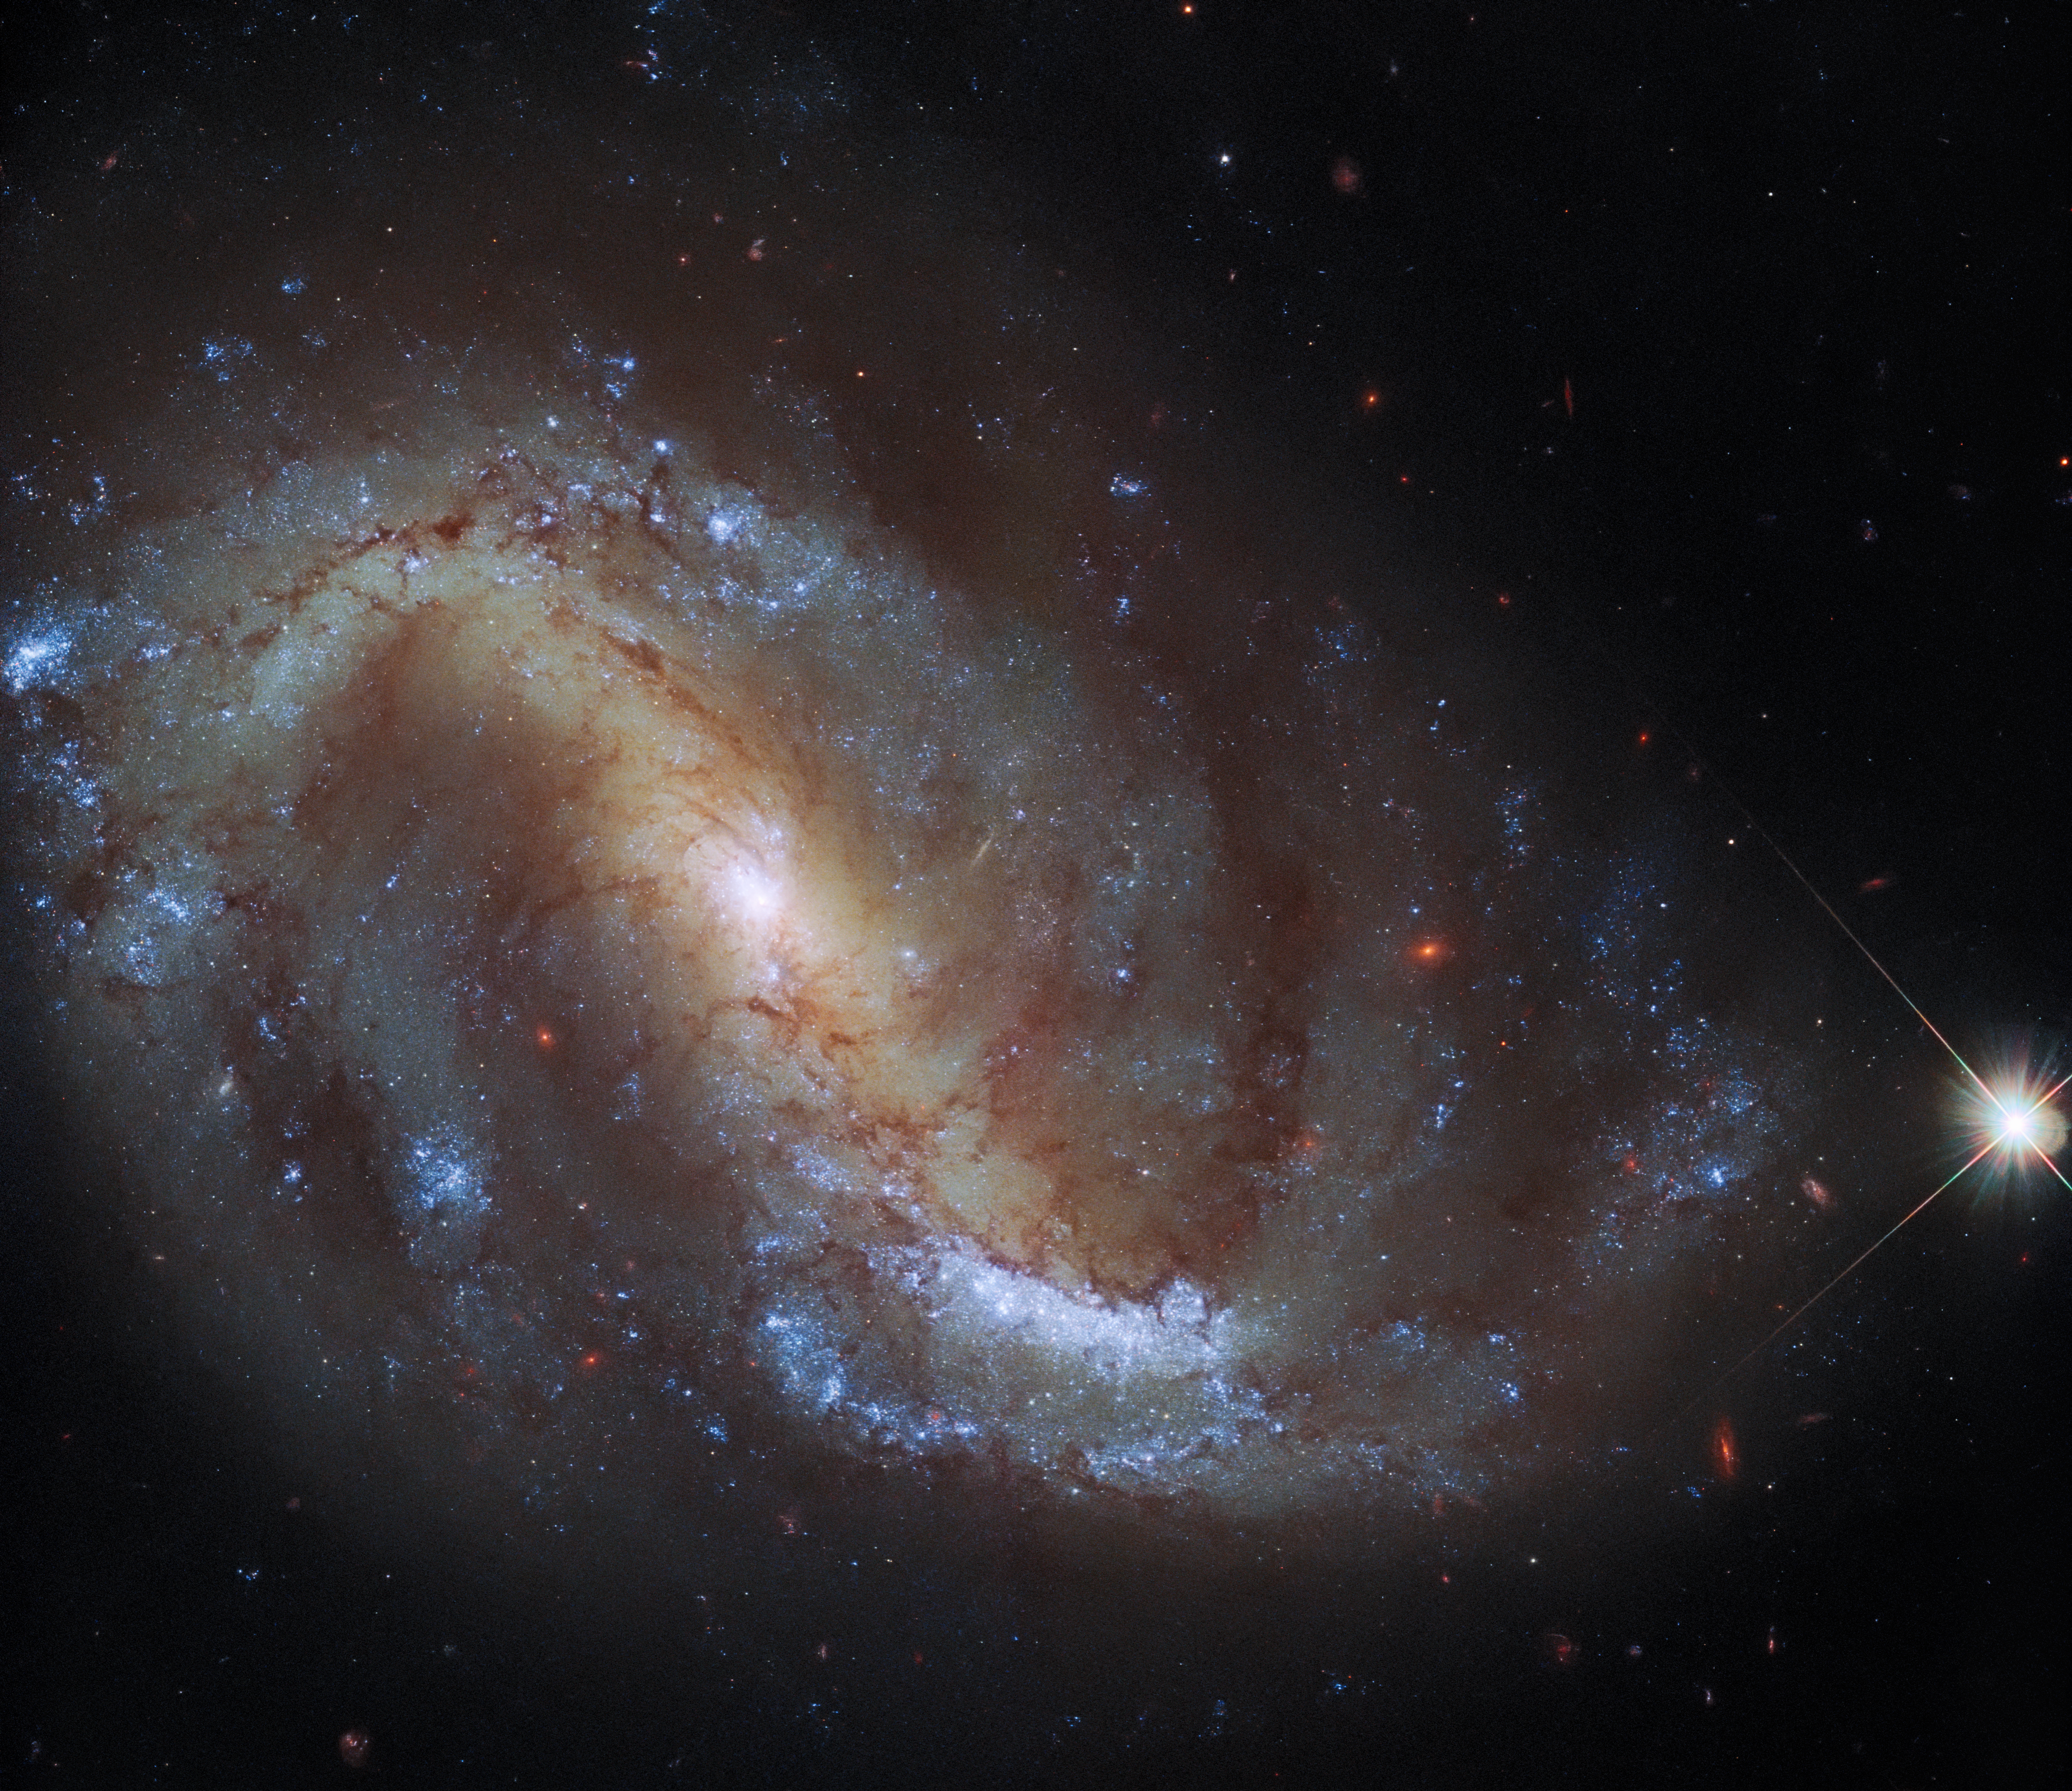

Hubble Goes Galactic Birdwatching

This image from the NASA/ESA Hubble Space Telescope shows the barred spiral galaxy NGC 7496, which lies over 24 million light-years away in the constellation Grus. This constellation, whose name is Latin for crane, is one of four constellations collectively known as the Southern Birds. The others are Pavo, Phoenix and Tucana, which depict a peacock, phoenix, and toucan respectively. The rest of the night sky is also home to a flock of ornithological constellations, including an eagle (Aquilla), swan (Cygnus), crow (Corvus), and dove (Columba).

This image comes from a collection of observations delving into the relationship between young stars and the cold, dense clouds of gas in which they form. In addition to observations with Hubble’s Wide Field Camera 3 and Advanced Camera for Surveys, the astronomers behind this project gathered data using the Atacama Large Millimeter/submillimeter Array (ALMA), one of the largest radio telescopes in the world.

As well as shedding light on the speed and efficiency of star formation in a variety of galactic environments, this project is also creating a treasury of data incorporating both Hubble and ALMA observations. This treasure trove of data from two of the world’s most capable observatories will contribute to wider research into star formation, as well as paving the way for future science with the James Webb Space Telescope.

Credit: ESA/Hubble & NASA, J. Lee and the PHANGS-HST Team Acknowledgement: J. Schmidt